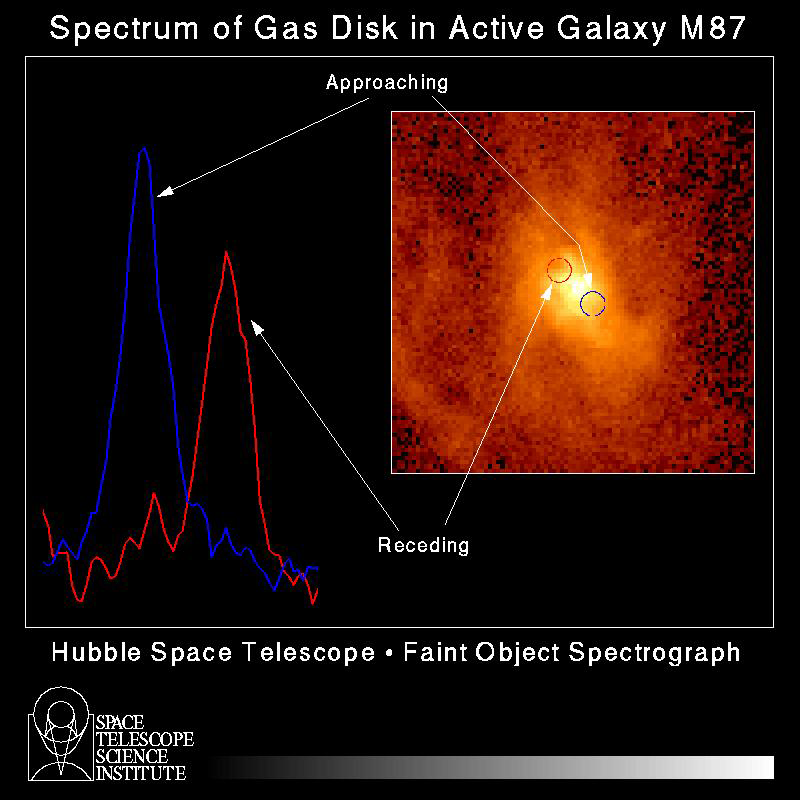

Spectrum of gas disc in active galaxy M87

A schematic diagram of velocity measurements of a rotating disk of hot gas in the core of active galaxy M87.

The measurement was made by studying how the light from the disk is redshifted and blueshifted -- as part of the swirling disk spins in earth's direction and the other side spins away from earth.

Credit: Holland Ford, Space Telescope Science Institute/Johns Hopkins University; Richard Harms, Applied Research Corp.; Zlatan Tsvetanov, Arthur Davidsen, and Gerard Kriss at Johns Hopkins; Ralph Bohlin and GeorgeHartig at Space Telescope Science Institute; Linda Dressel and Ajay K.Kochhar at Applied Research Corp. in Landover, Md.; and Bruce Margon fromthe University of Washington in Seattle NASA/ESA